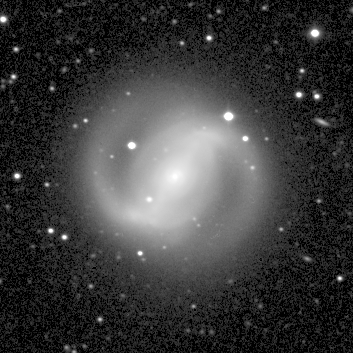

Galaxy NGC 4314 (Ground-Based View)

This image, taken in February 1996 by the 30-inch telescope Prime Focus Camera at the McDonald Observatory in Texas, shows the entire galaxy, including the bar of stars bisecting the core and the outer spiral arms, which begin near the ends of this bar. The box around the galaxy's core pinpoints the focus of the Hubble image.

Credit: McDonald Observatory